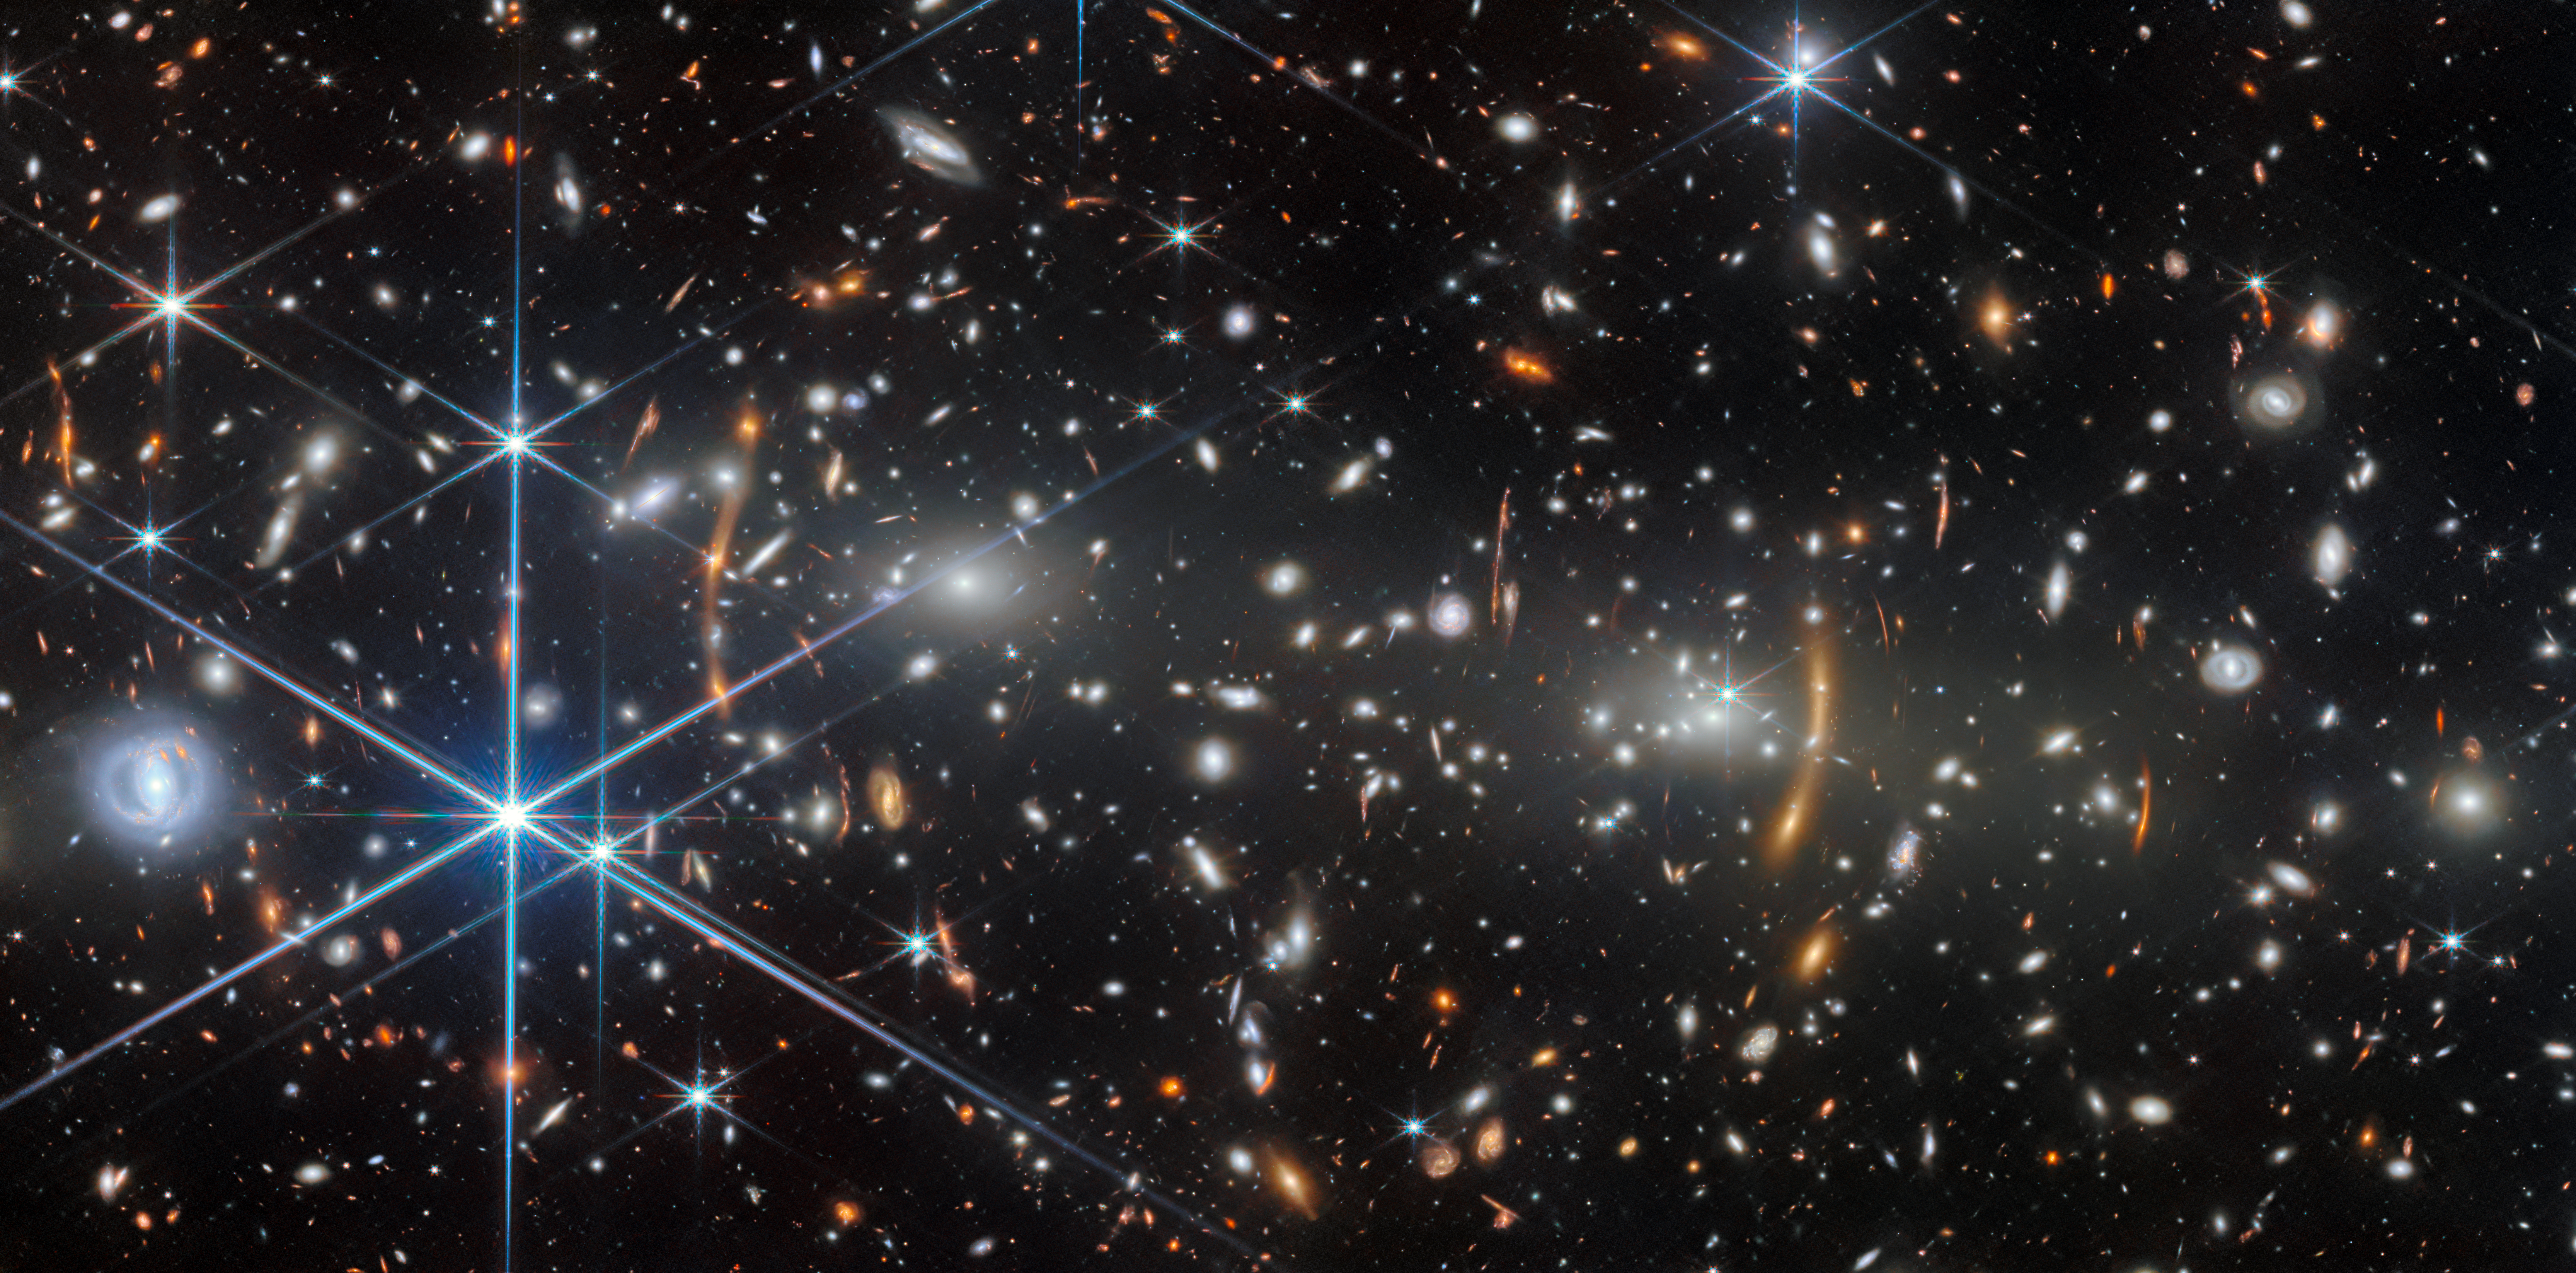

A cosmic construction project

In today’s Picture of the Month from the NASA/ESA/CSA James Webb Space Telescope we are taken on a visit to a building site of significant scale. The project is a galaxy cluster named MACS J0553.4-3342, located in the constellation Columba (the Dove).

MACS J0553.4-3342 is situated at a redshift of 0.412. Redshift is a measure of how much the cluster’s light has been stretched by the expansion of the Universe over the course of its long journey to Webb’s mirrors; this unassuming number tells us that we are seeing MACS J0553.4-3342 as it was 4.4 billion years in the past. But for a galaxy cluster, this is relatively young. In fact, observations with the NASA/ESA Hubble Space Telescope and other telescopes show a cluster still in the process of being built.

MACS J0553.4-3342 is composed of two sub-clusters — roughly equal in mass — that are actively merging. The two subclusters have already slammed through each other and travelled over one million light-years apart, but they will eventually come back together again and again until they finally merge. The construction process is messy, and MACS J0553.4-3342 is filled with extremely hot gas that radiates powerful X-rays. Each subcluster is anchored on an immensely bright and massive elliptical galaxy, which are easily identifiable as the two brightest points in the centre of this scene with the largest glowing halos around them. The many smaller white elliptical galaxies are bound to one of the two subclusters by gravity, and will be incorporated into the final galaxy cluster. This image also features many foreground galaxies — spirals and dusty discs that are unrelated to MACS J0553.4-3342 — and prominent bright stars in our own Milky Way galaxy.

Even mid-way through its construction, the titanic clumps of matter swirling around in this galaxy cluster have built a device that is already very useful for us here on Earth: a gravitational lens. The extreme and concentrated mass in MACS J0553.4-3342 curves light with its gravity, similar to how a glass lens bends and focuses light. In this image you can see prominent orange, stretched-out arcs alongside each of the subclusters. These arcs are images of distant background galaxies, whose light has been warped by the galaxy cluster’s gravitational pull. The arc on the left side, three bright spots joined together, is actually three images of a single background galaxy! A forest of smaller arcs and lines are scattered across the image too; such a fantastic view appears in few other places in the Universe.

Look in the right spot, however, and this galaxy cluster turns from a distorting funhouse mirror into a precision scientific device. The gravitational lensing focuses light, magnifying objects and enhancing their brightness so if they lie in exactly the right place, background galaxies and even individual stars that would have been far too faint and distant to spot will be made visible. By carefully mapping out the mass of the cluster, researchers can reconstruct where and how strongly it distorts light from our point of view, then search for serendipitously-magnified distant objects to study. The arcs we can see in MACS J0553.4-3342 already show a few galaxies from less than a billion years after the Big Bang.

This image, taken with Webb’s Near-Infrared Camera (NIRCam), stems from a survey programme named VENUS (#6882). Astronomers aimed to create a collection of deep, high-quality images of massive galaxy clusters like MACS J0553.4-3342 across a wide range of infrared wavelengths, greatly expanding the area covered by Webb’s sensitive instruments. Researchers can then scour the clusters for distant and faint objects that have been brightened through gravitational lensing, from young galaxies and low-mass black holes to supernova explosions and individual stars. Gravitational lensing has been key to many of Webb’s most dramatic discoveries in recent years, and having many more examples of it allows us to systematically study the distant past and the evolutionary stages of the galaxies, stars and black holes we see today.

Credit: ESA/Webb, NASA & CSA, S. Fujimoto